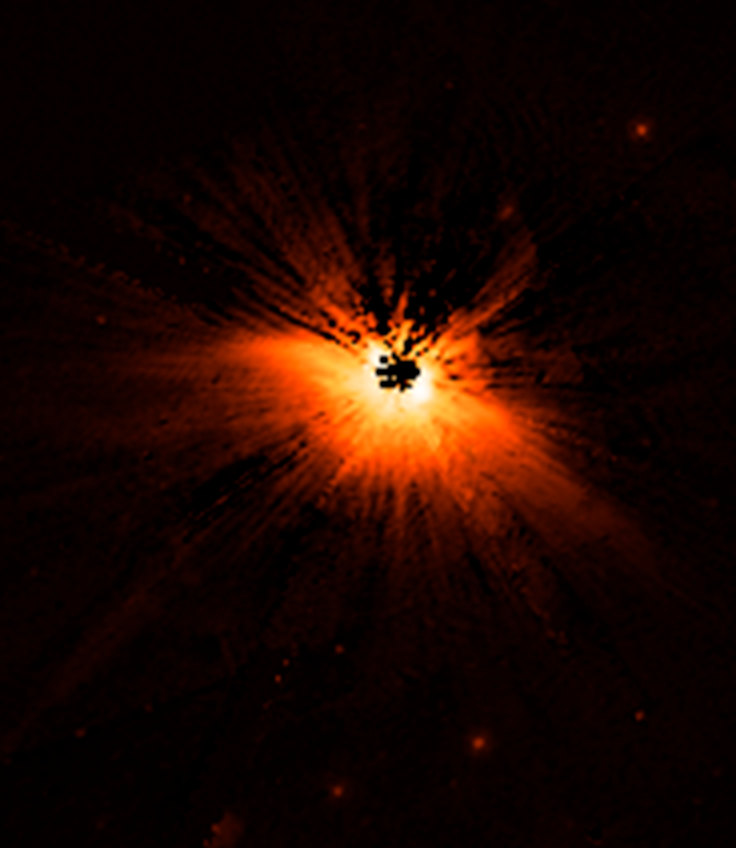

Too Fast, Too Furious: A Galaxy's Fatal Plunge

Circumstellar Disk HD 61005

Credit: NASA, D. Hines (Space Science Institute, New Mexico Office in Corrales, New Mexico), and G. Schneider (University of Arizona)